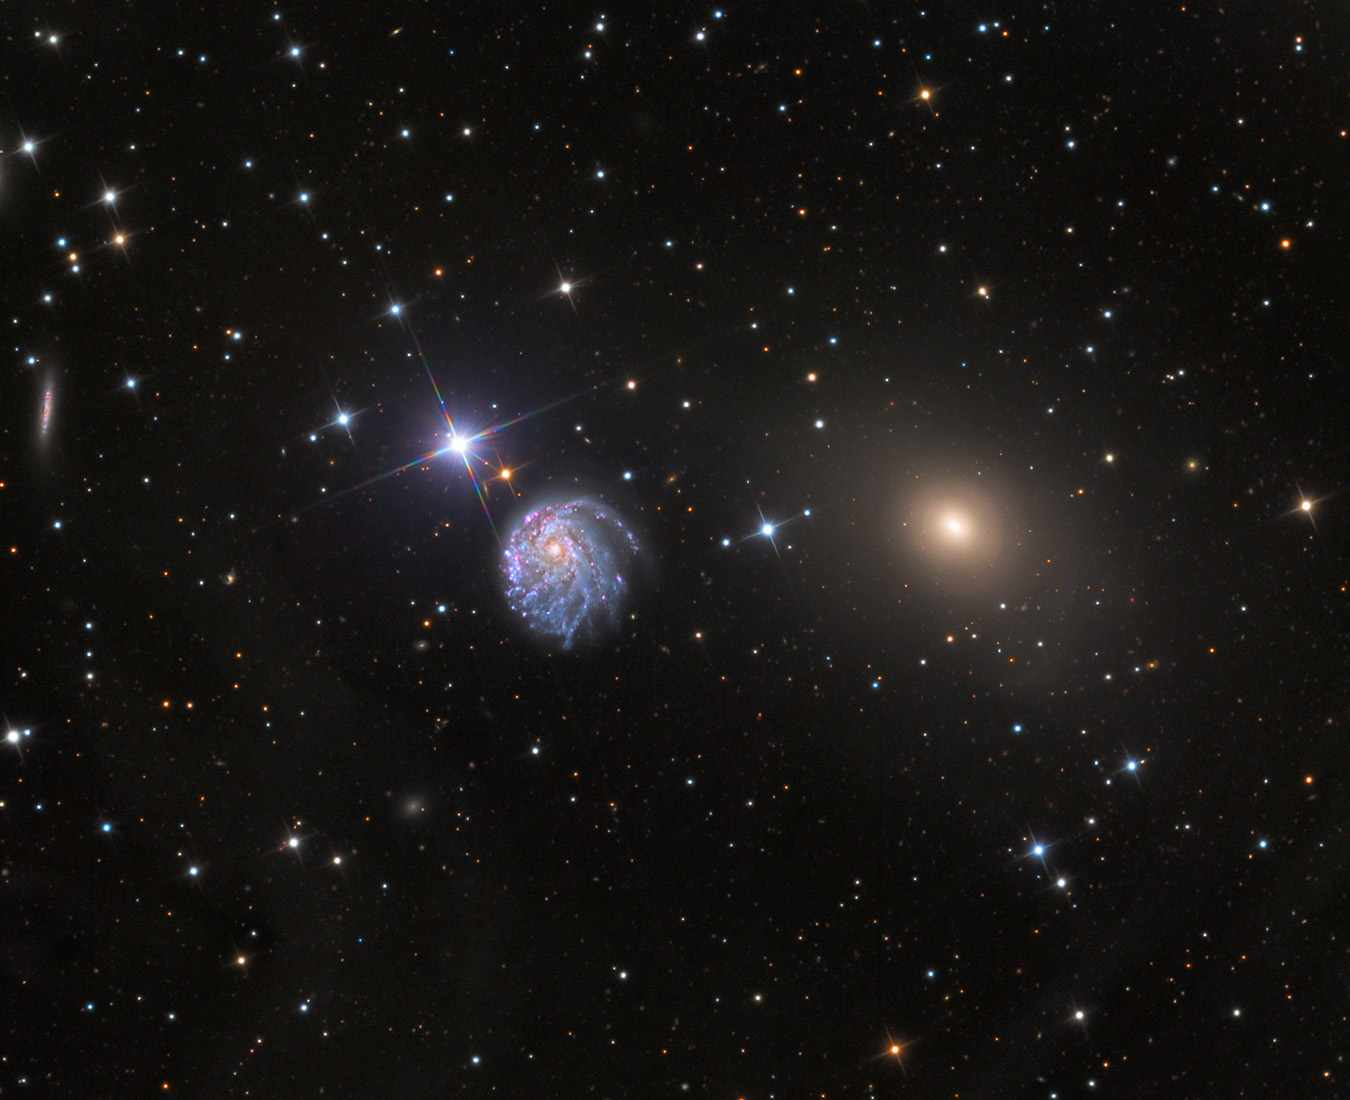

Wide-Field View of NGC 2276

This image shows a wide-field view of NGC 2276, a spiral galaxy 120 million light-years away in the constellation of Cepheus. At first glance, the delicate tracery of bright spiral arms and dark dust lanes resembles countless other spiral galaxies. A closer look reveals a strangely lopsided galaxy shaped by gravitational interaction and intense star formation.

Credit: Adam Block/Mount Lemmon SkyCenter/University of Arizona